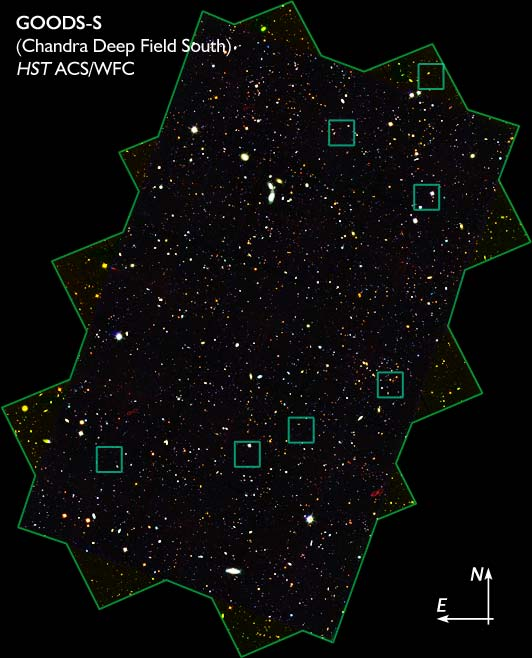

Location of 7 AGN in GOODS/CDF-S

The combined power of NASA's Great Observatories - the Hubble Space Telescope, the Chandra X-ray Observatory, and the Spitzer Space Telescope - have been combined to find a hidden population of supermassive black holes in the universe. It took the penetrating view of Spitzer to finally uncover the black holes and their surrounding galaxies.

Credit: NASA, ESA, A. M. Koekemoer (STScI), M. Dickinson (NOAO) and The GOODS Team